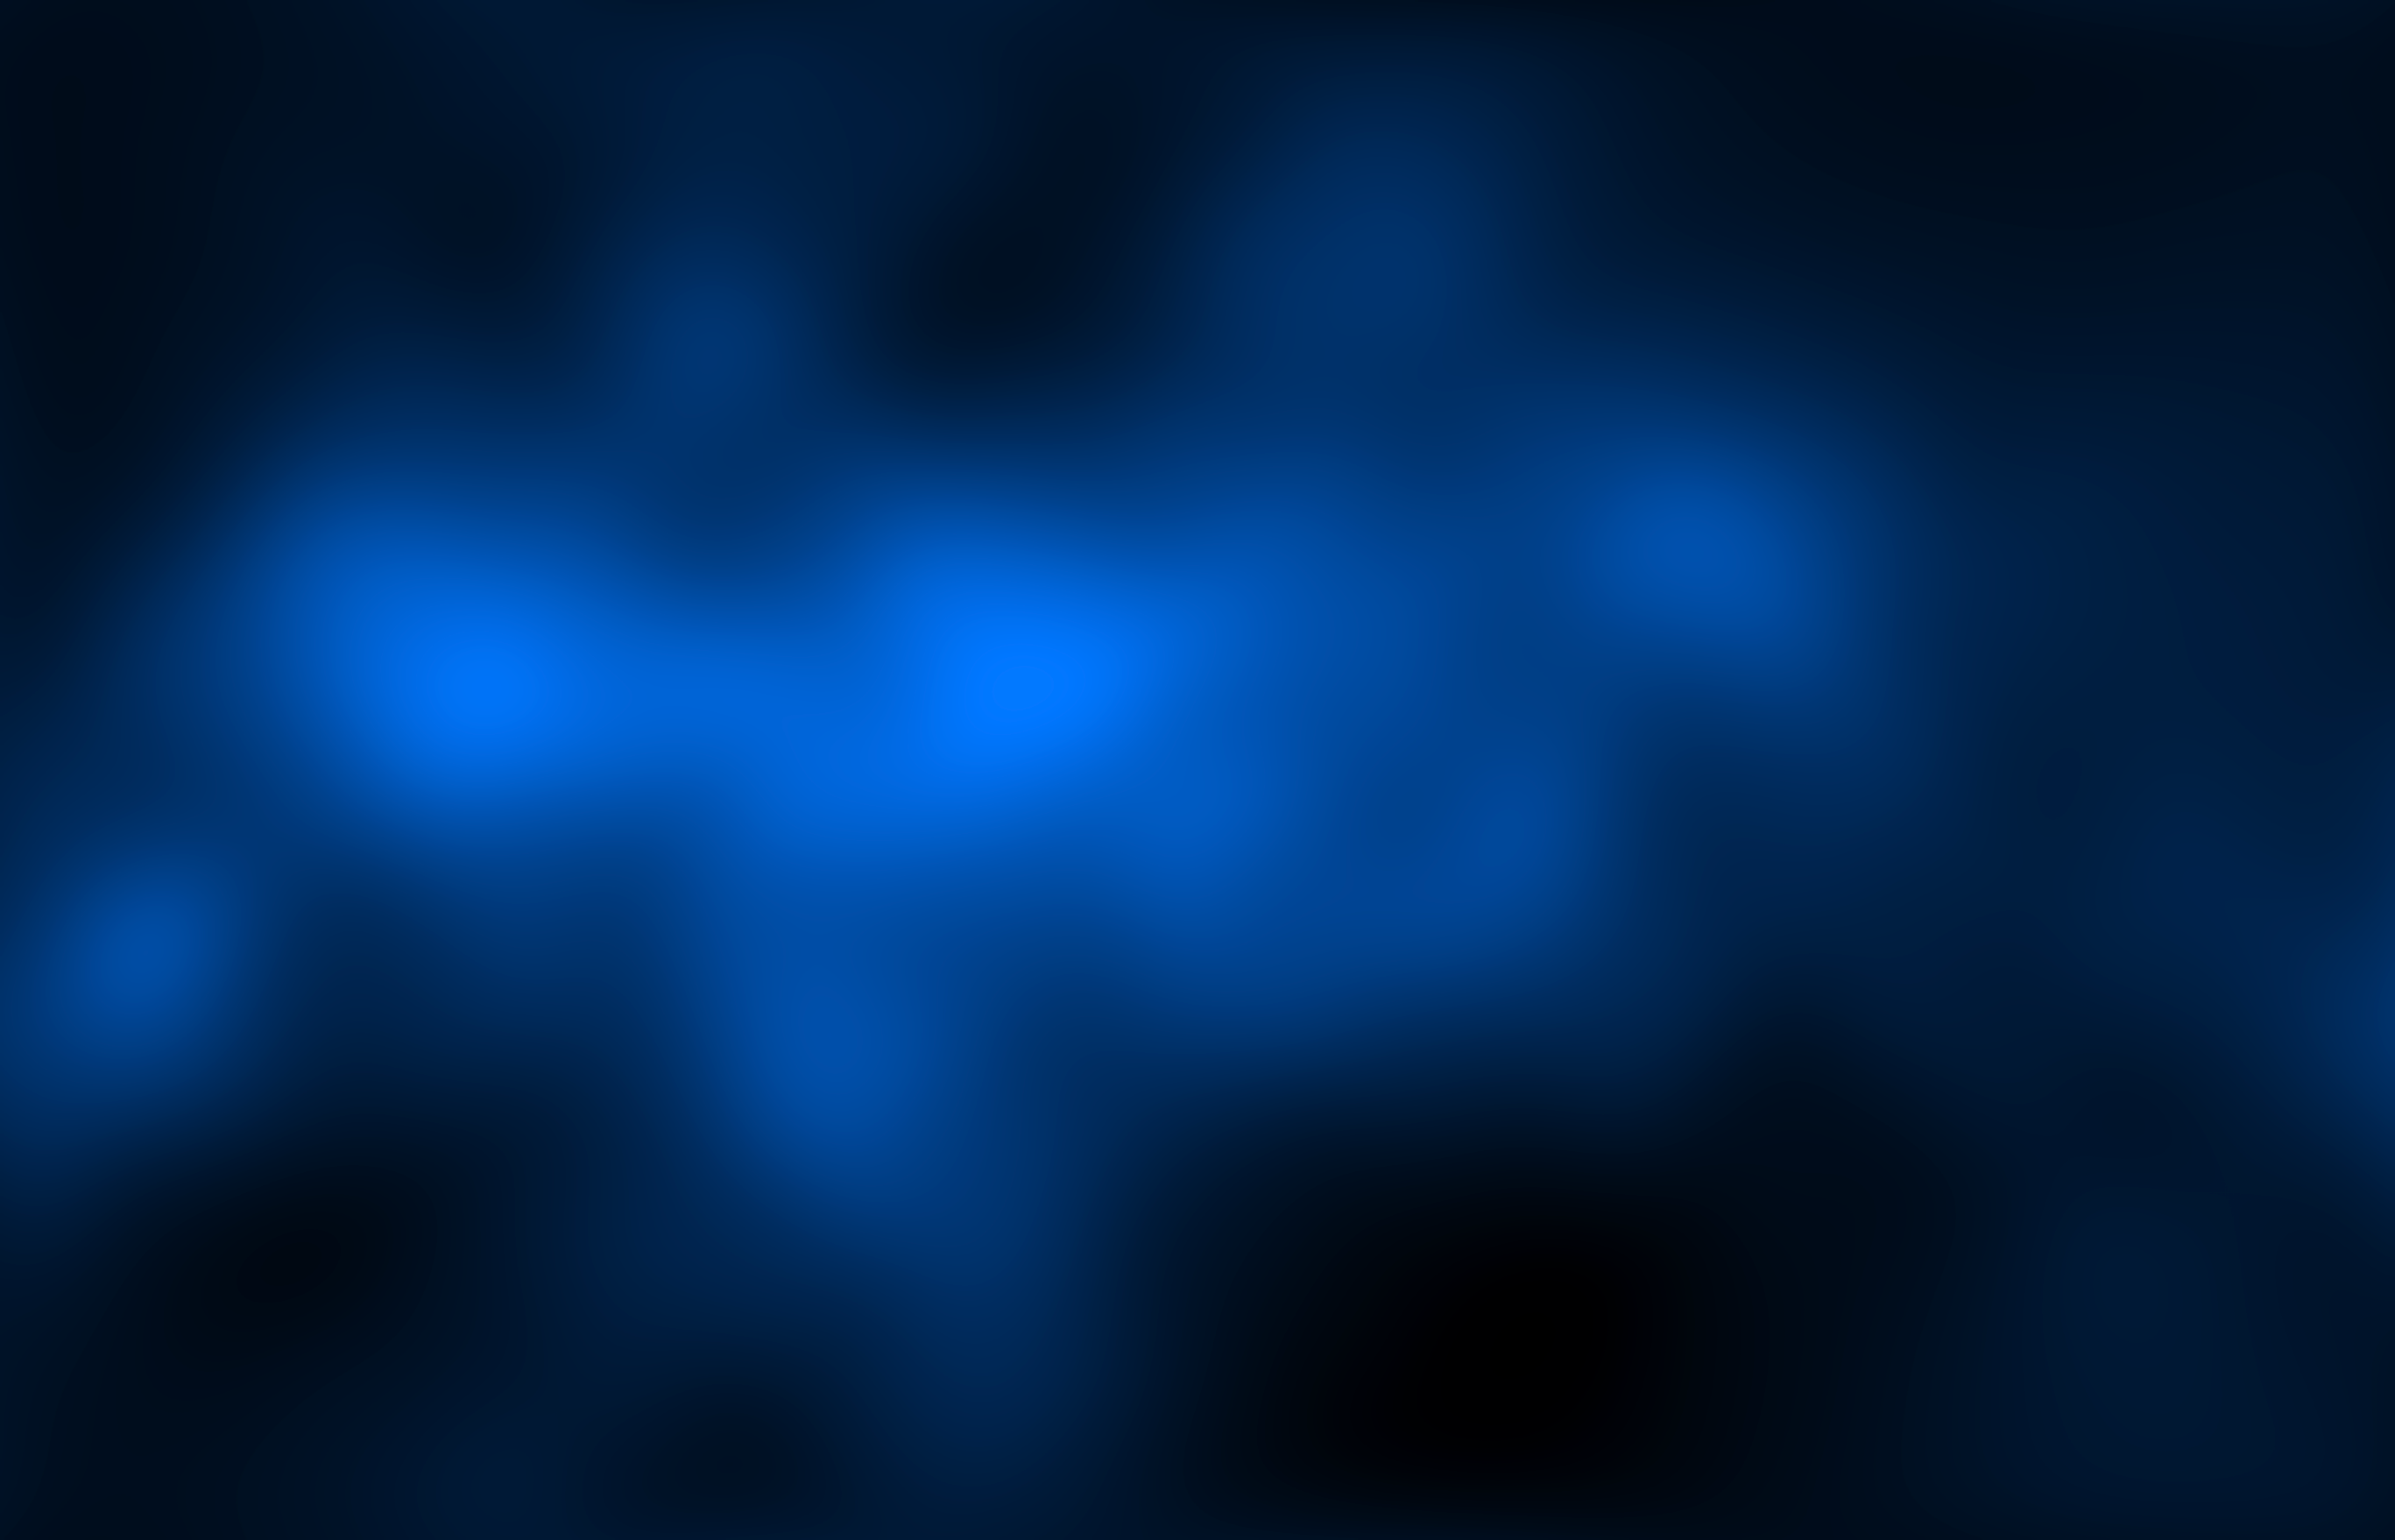

Galaxy cluster Abell 520's mass (HST WFPC2)

This image shows the location of most of the mass in merging galaxy cluster Abell 520's core, which is dominated by dark matter. Dark matter is an invisible substance that makes up most of the Universe's mass. The dark-matter map was derived from Hubble Wide Field Planetary Camera 2 observations, by detecting how light from distant objects is distorted by the cluster galaxies, an effect called gravitational lensing.

Abell 520 resides 2.4 billion light-years away.

Credit: NASA, ESA, and M.J. Jee (University of California, Davis)